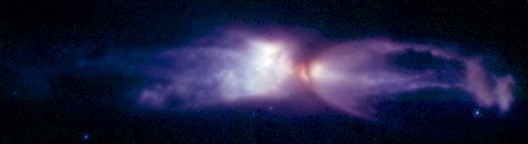

The 'Rotten Egg' nebula - a planetary nebula in the making

This is a composite of four images taken with different NICMOS infrared filters on March 28, 1998. It shows that the physical properties of the material, both composition and temperature, vary significantly throughout the outflowing material.

Credit: NASA, ESA, William B. Latter (SIRTF Science Center/California Institute of Technology), John H. Bieging (University of Arizona), Casey Meakin (University of Arizona), A.G.G.M. Tielens (Kapteyn Astronomical Institute), Aditya Dayal (IPAC/NASA Jet Propulsion Laboratory), Joseph L. Hora (Center for Astrophysics), and DouglasM. Kelly (University of Arizona)